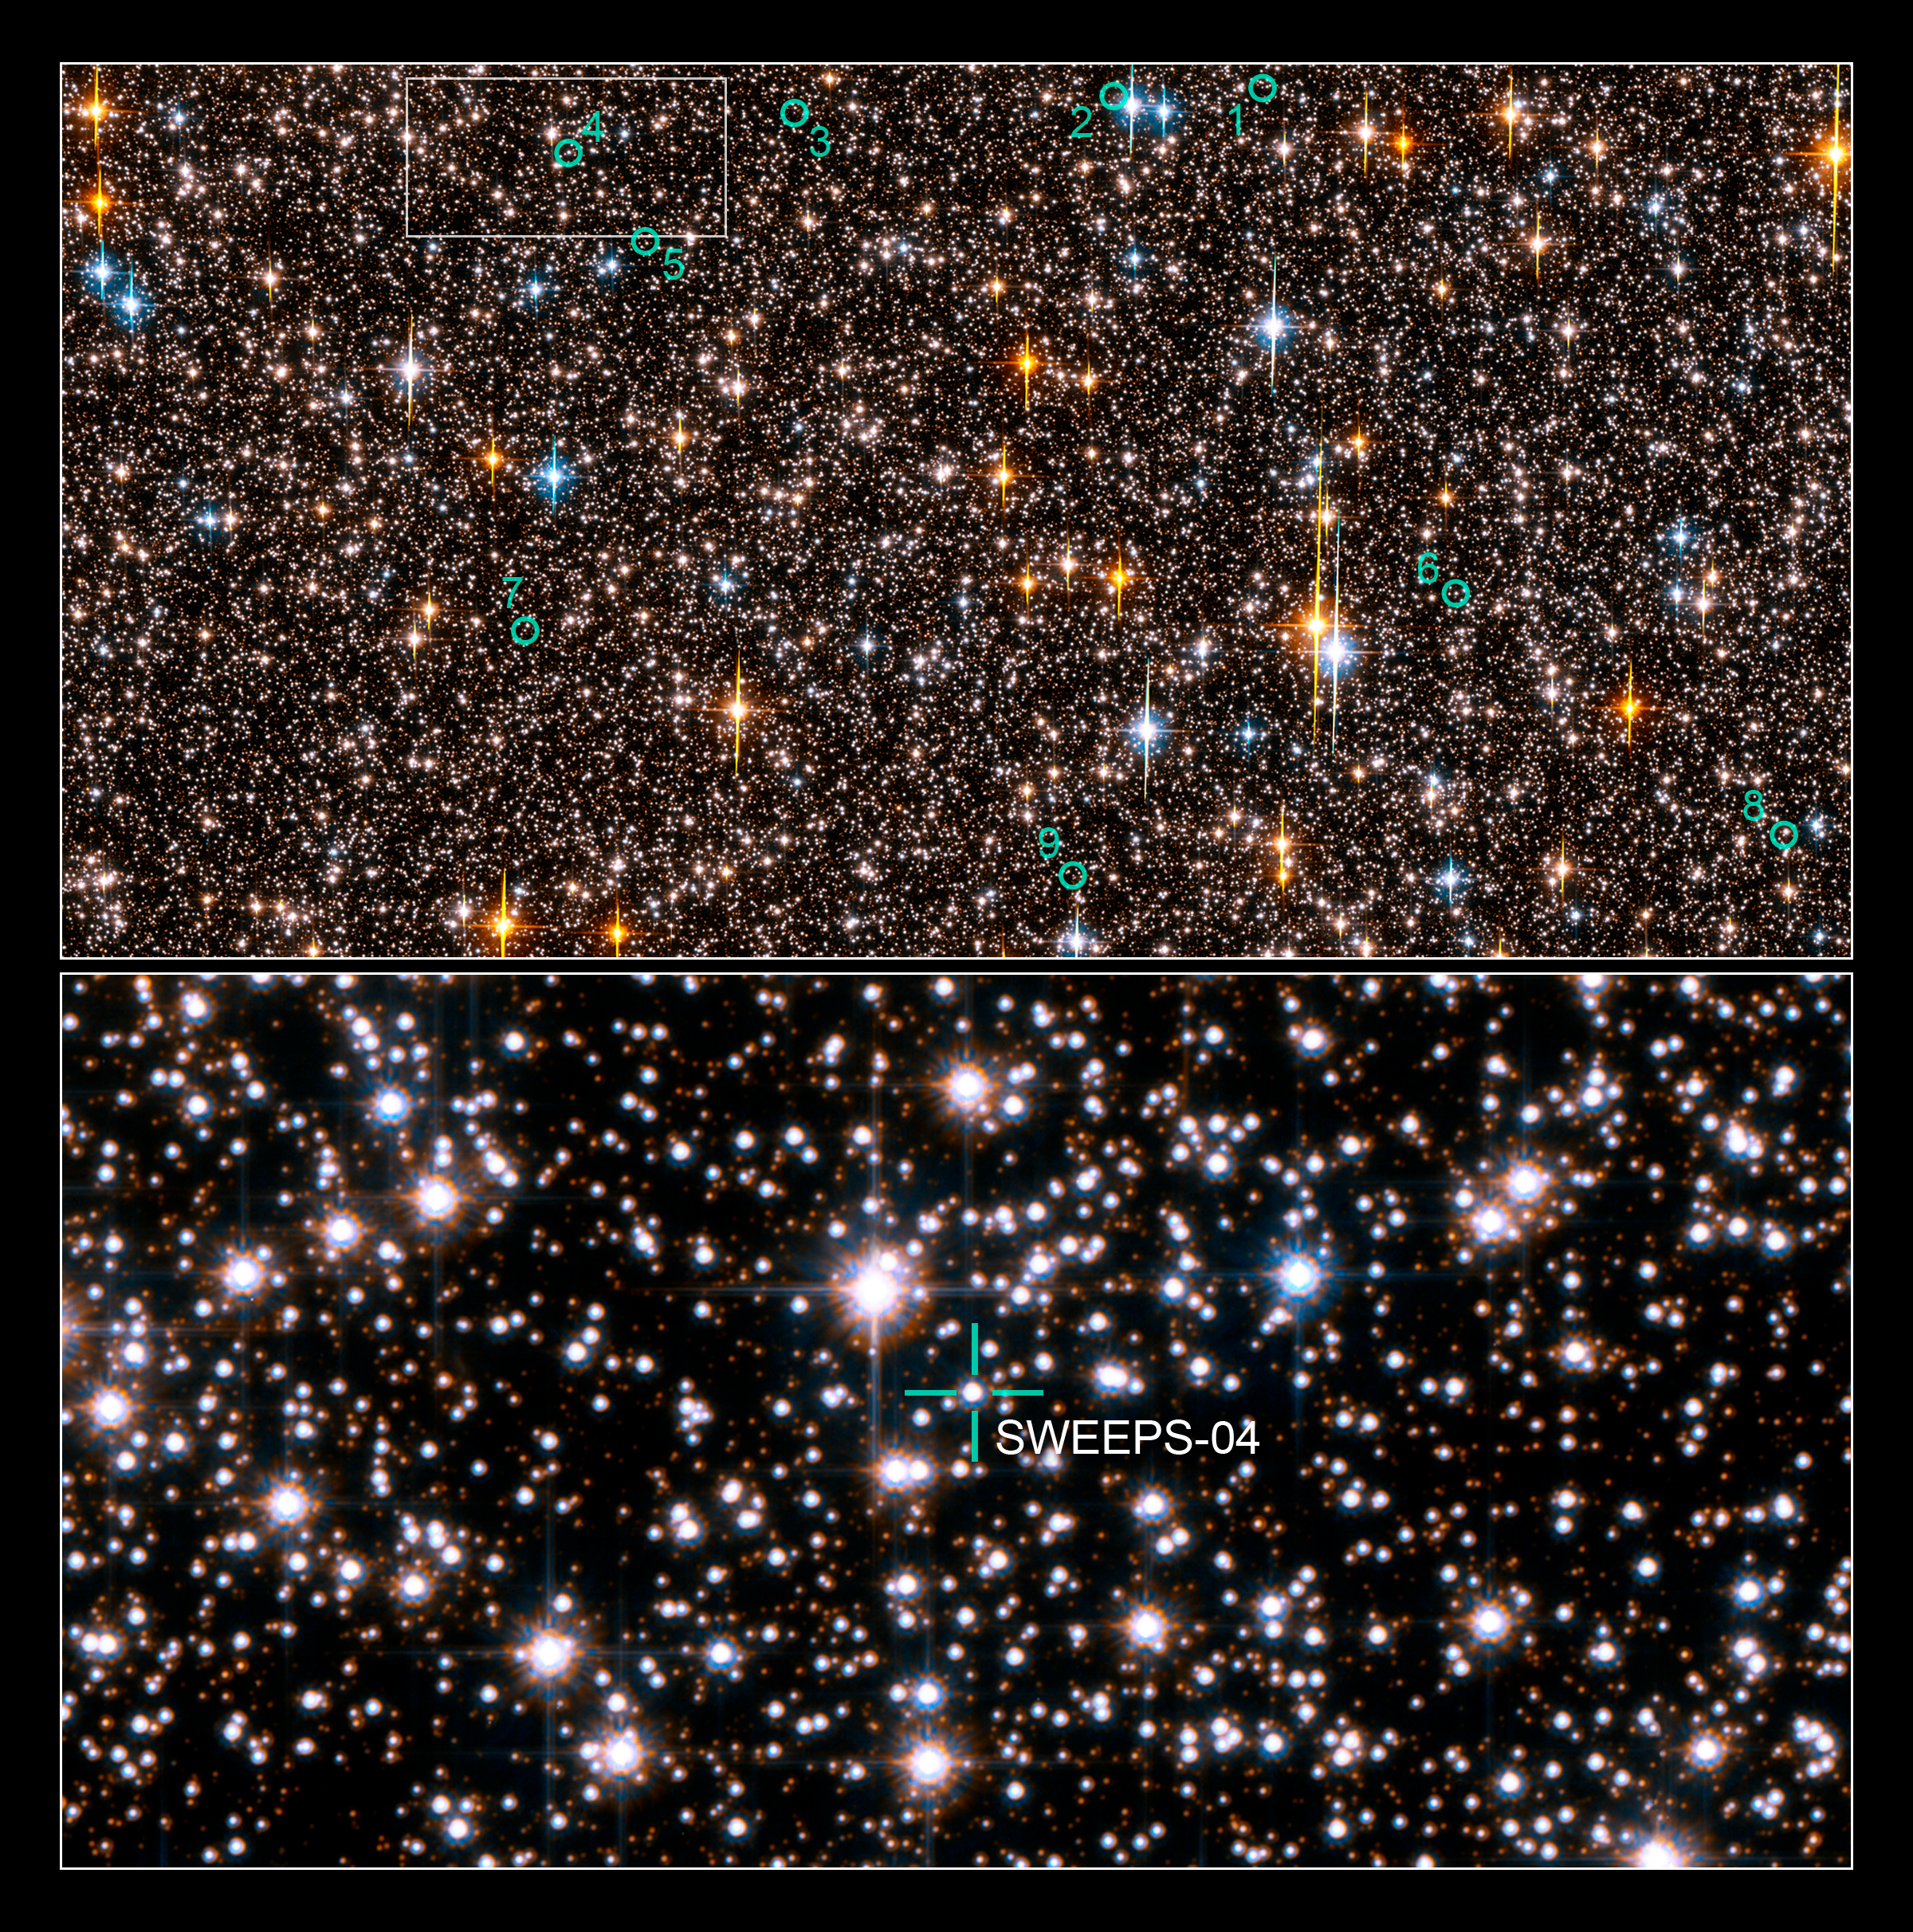

Hubble extrasolar planet search field in Sagittarius

This is an image of one-half of the Hubble Space Telescope field of view in the Sagittarius Window Eclipsing Extrasolar Planet Search (SWEEPS). The field contains approximately 150,000 stars, down to 30th magnitude. The stars in the Galactic disk and bulge have a mixture of colours and masses. The field is so crowded with stars because Hubble was looking across 26,000 light-years of space in the direction of the centre of our Galaxy.

Half of these stars are bright enough for Hubble to monitor for any small, brief and periodic dips in brightness caused by the passage of an extrasolar planet passing in front of the star, an event called a transit. Hubble took approximately 520 pictures of this field, at red and blue wavelengths, 22 to 29 February, 2004. The green circles identify 9 stars that are orbited by planets with periods of a few days. Planets so close to their stars with such short orbital periods are called "hot Jupiters."

These are considered "candidate" extrasolar planets because most of them are too faint to allow for spectroscopic observations that would allow for a precise measure of the planet's mass. The Hubble observations allow for a robust statistical estimate of the possible "false positives", which suggests that at least 45 percent of the candidates must be genuine planets.

The bottom frame identifies one of two stars in the field where astronomers were able to spectroscopically measure the star's back-and-forth wobble due to the pull of the planet. The planet turns out to be less than 3.8 Jupiter masses.

Credit: NASA, ESA, K. Sahu (STScI) and the SWEEPS science team